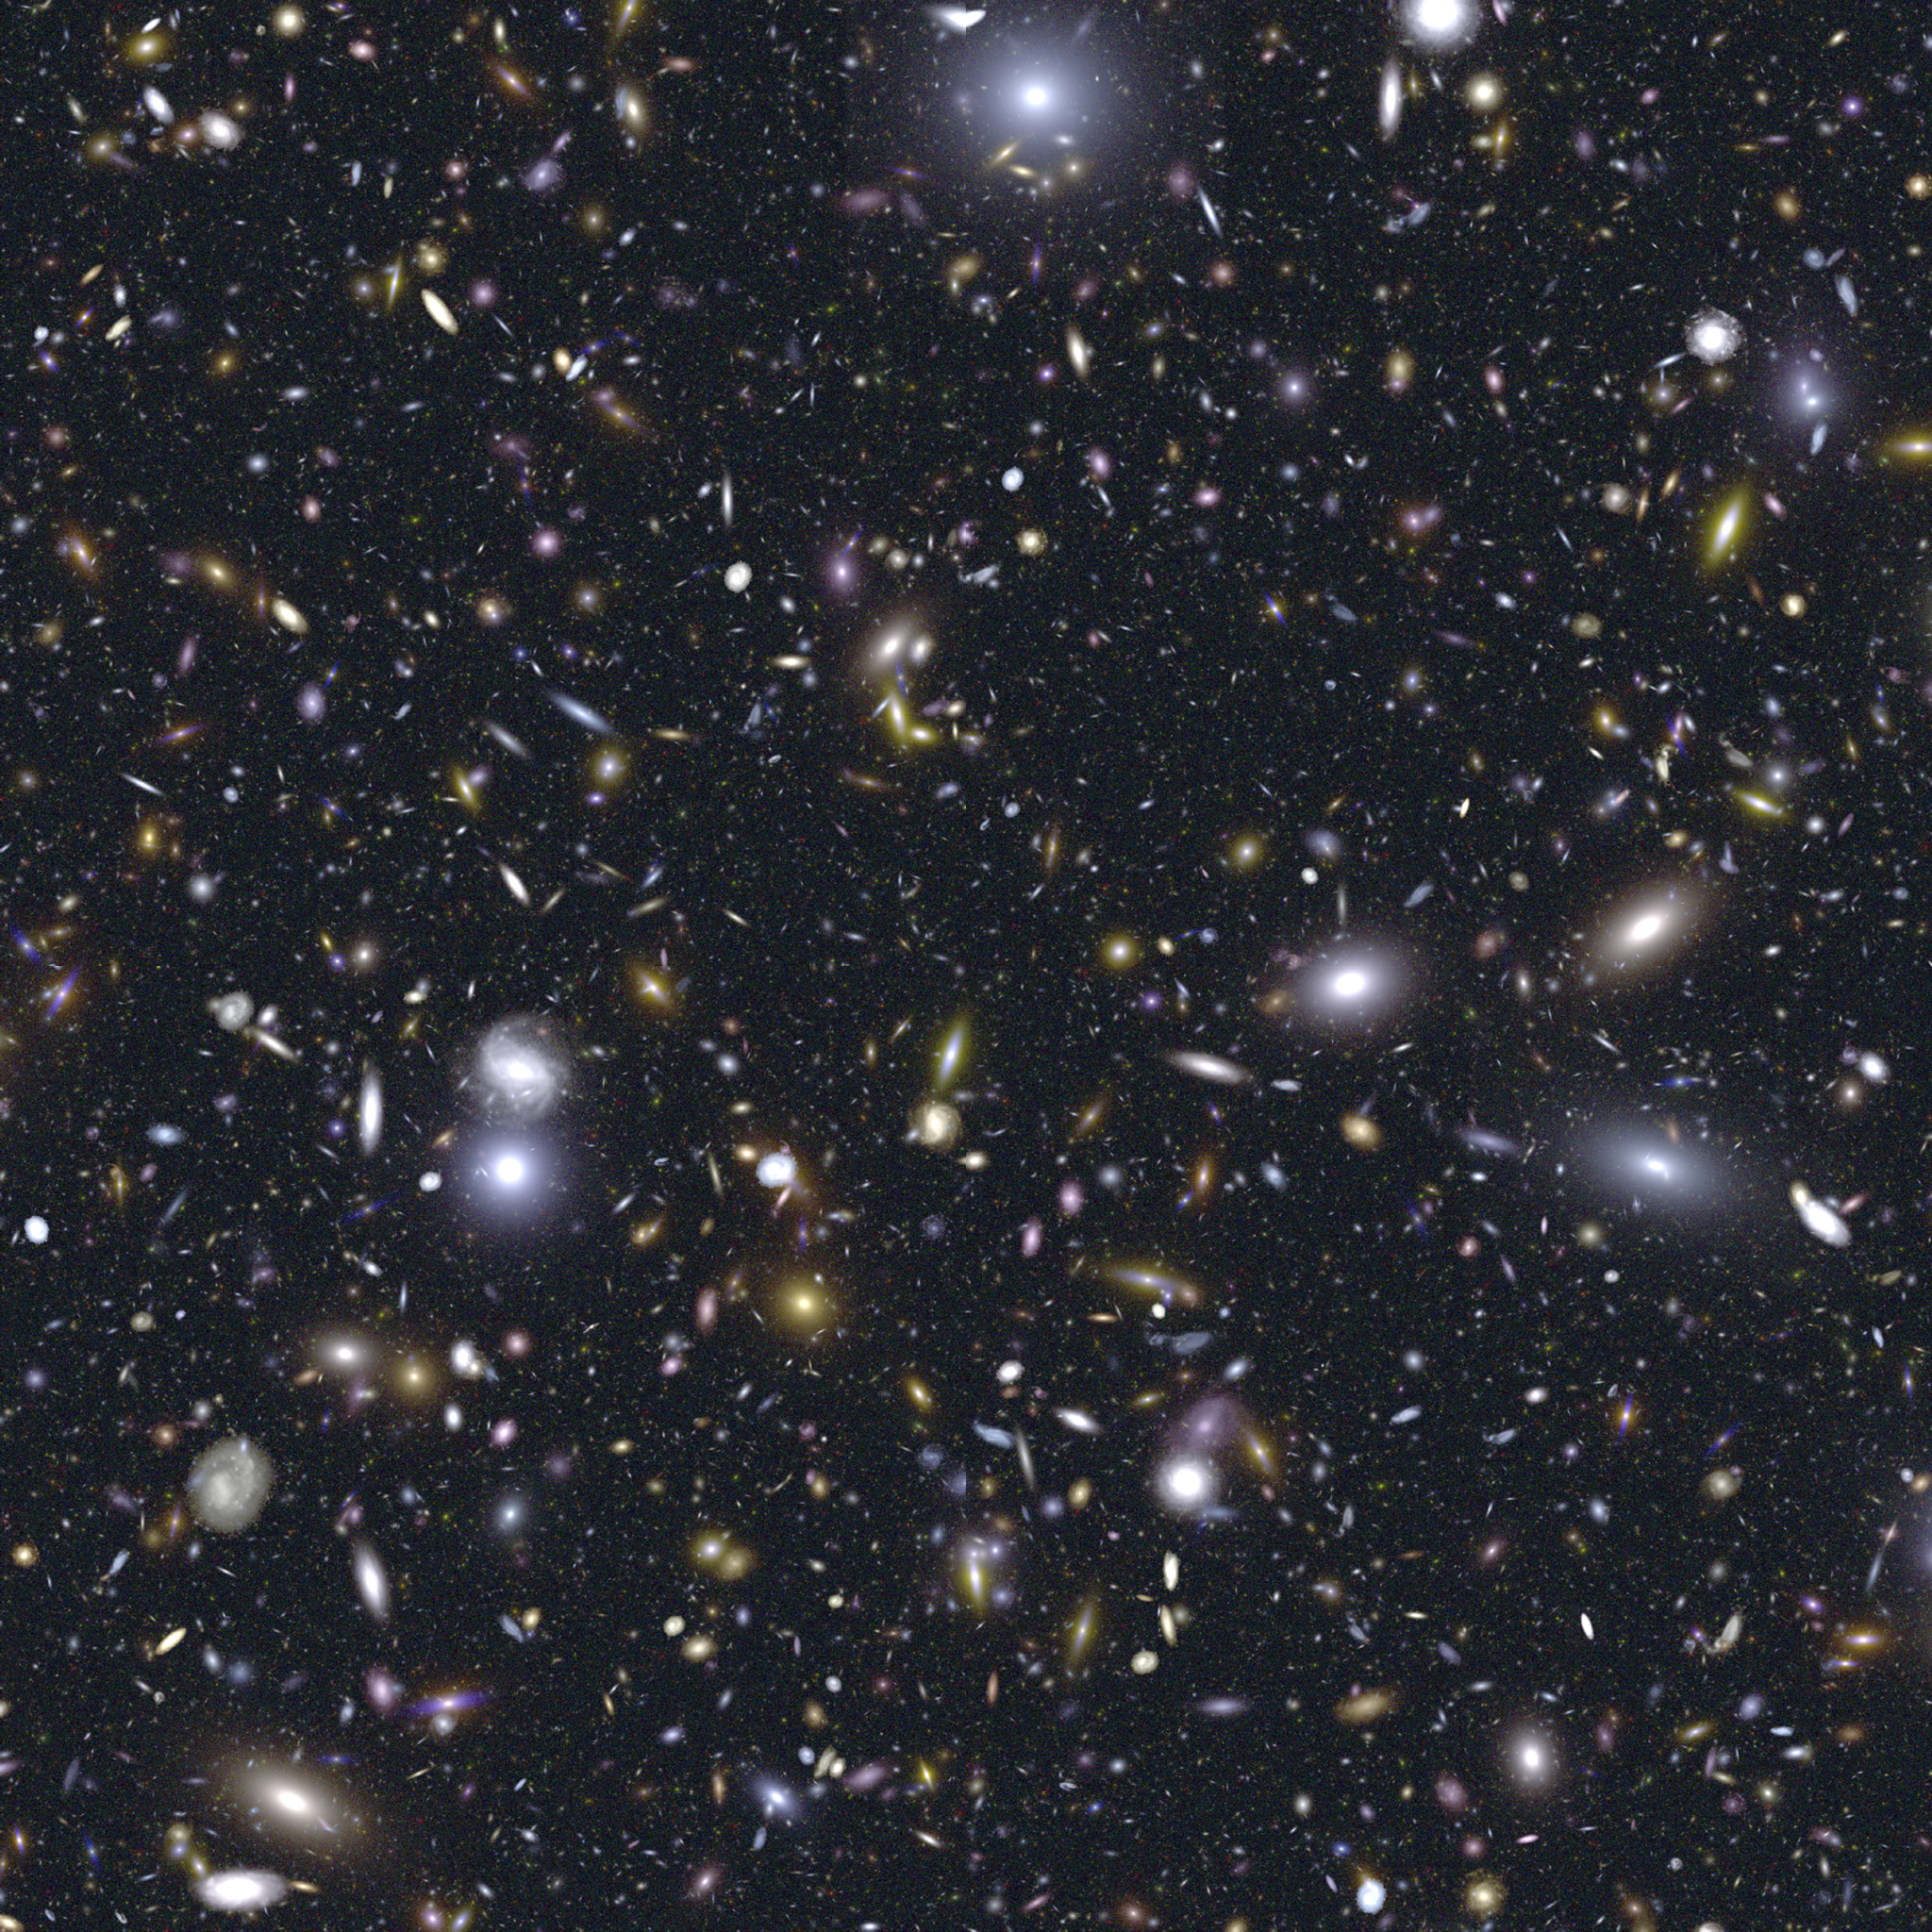

Simulation of JWST performance

Billions and billions! A simulation of JWST's field of view shows galaxies with unprecedented clarity.

Credit: STScI